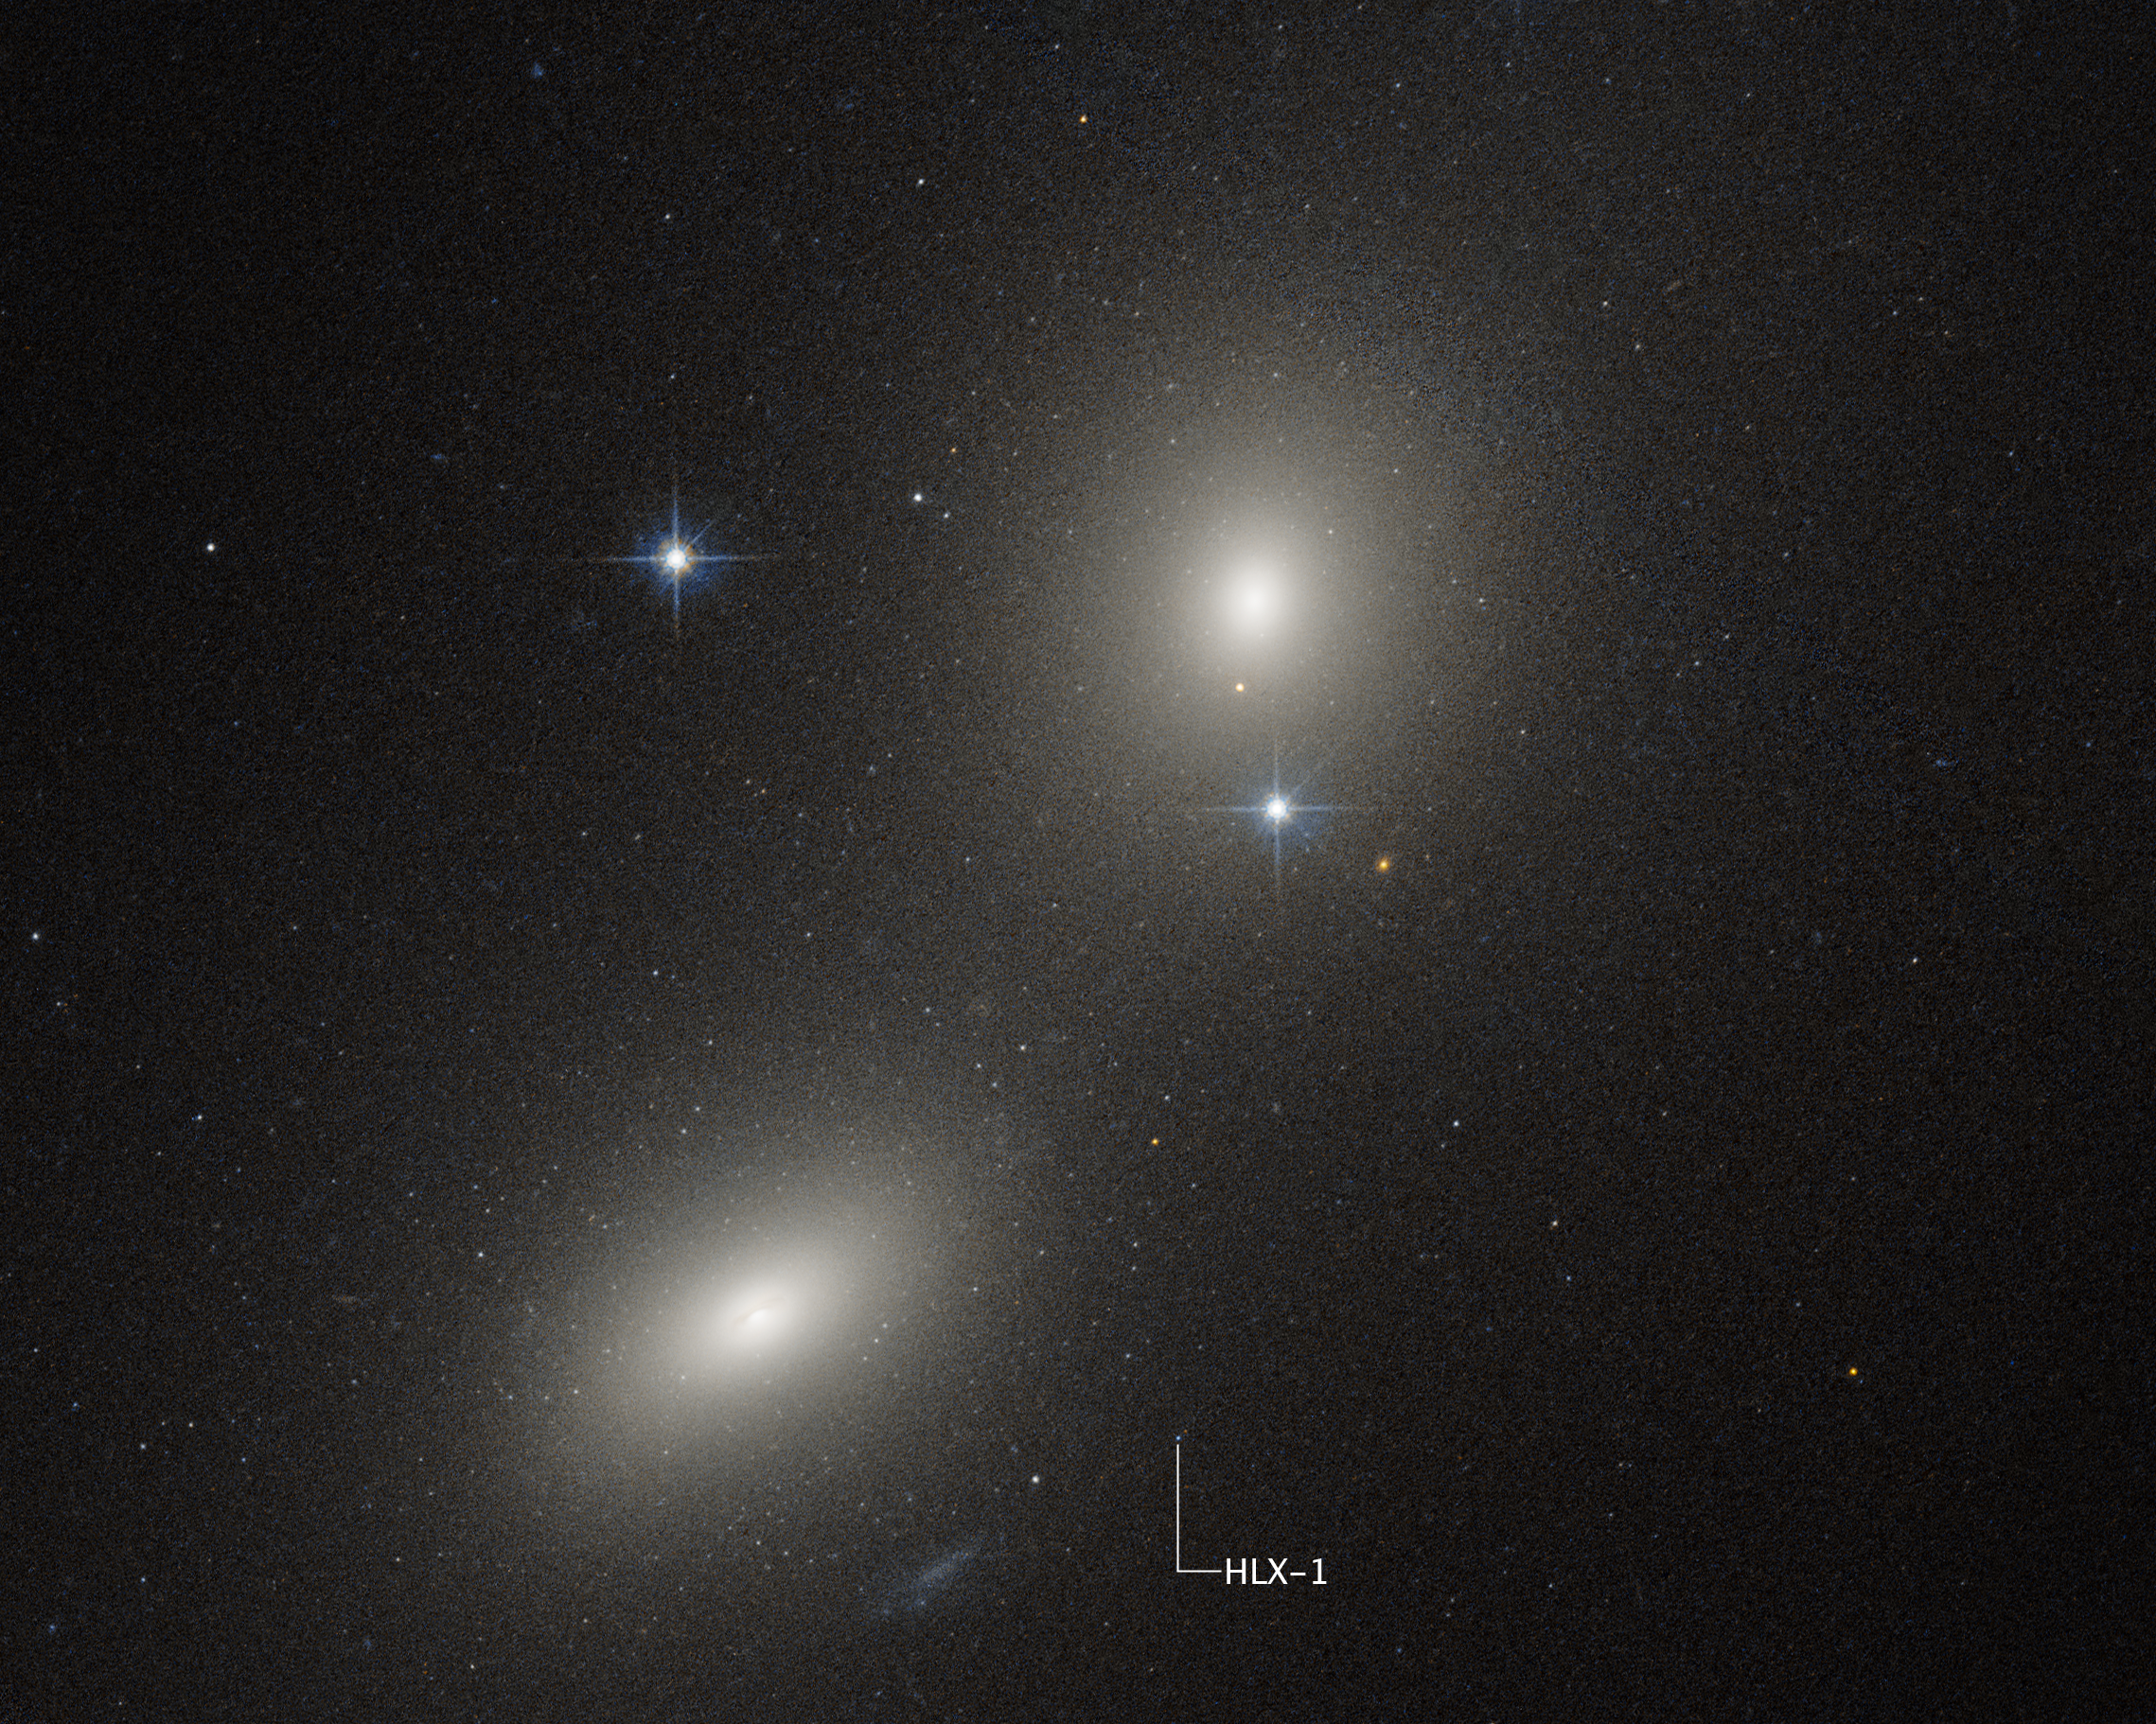

IMBH near NGC 6099 (Hubble image)

The NASA/ESA Hubble Space Telescope and NASA’s Chandra X-ray Observatory have teamed up to identify a new possible example of a rare class of black holes. Called NGC 6099 HLX-1, this bright X-ray source seems to reside in a compact star cluster in a giant elliptical galaxy.

Just a few years after its 1990 launch, Hubble discovered that galaxies throughout the Universe can contain supermassive black holes at their centers weighing millions or billions of times the mass of our Sun. In addition, galaxies also contain as many as millions of small black holes weighing less than 100 times the mass of the Sun. These form when massive stars reach the end of their lives.

Far more elusive are intermediate-mass black holes (IMBHs), weighing between a few hundred to a few 100,000 times the mass of our Sun. This not-too-big, not-too-small category of black holes is often invisible to us because IMBHs don’t gobble as much gas and stars as the supermassive ones, which would emit powerful radiation. They have to be caught in the act of foraging in order to be found. When they occasionally devour a hapless bypassing star — in what astronomers call a tidal disruption event— they pour out a gusher of radiation.

The newest probable IMBH is located on the galaxy NGC 6099’s outskirts at approximately 40,000 light-years from the galaxy’s center, as described in a new study in the Astrophysical Journal. The galaxy is located about 450 million light-years away in the constellation Hercules.

This Hubble Space Telescope image shows a pair of galaxies: NGC 6099 (lower left) and NGC 6098 (upper right). The white dot labeled HLX-1 is the visible-light component of the location of a compact star cluster where the intermediate-mass black hole is tearing apart a star.

Credit: NASA, ESA, Y.C. Chang (National Tsing Hua University), J. DePasquale (STScI)